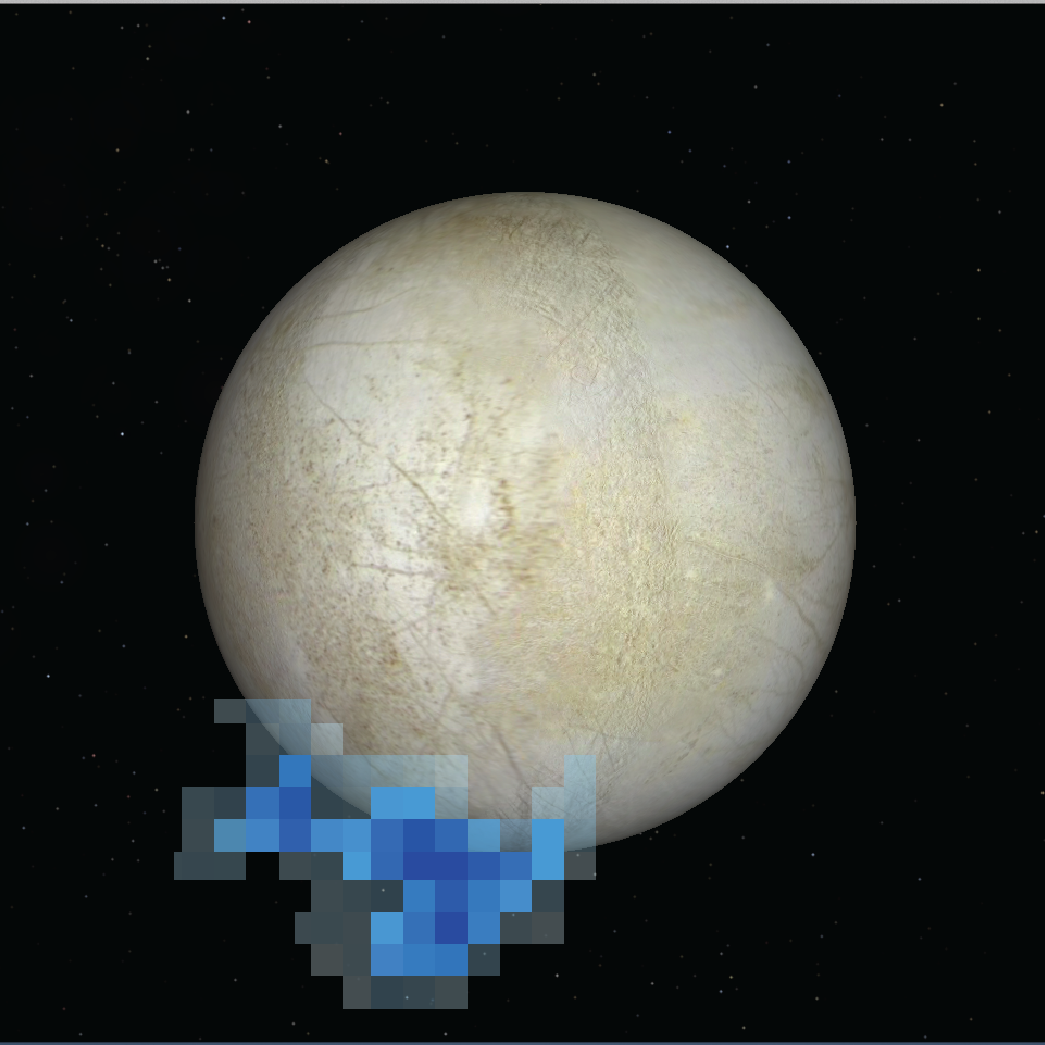

Water vapour plumes over Europa

This artist's rendering shows the location of plumes of water vapour detected over Europa's south pole in observations taken by the NASA/ESA Hubble Space Telescope in December 2012.

The appearance of the plumes in this graphic is based on spectroscopic observations of oxygen and hydrogen in the auroral emissions. The aurora is powered by Jupiter’s magnetic field. This is only the second moon in the solar system found ejecting water vapour from its frigid surface.

The surface of Europa is derived from a global surface map generated from combined NASA Voyager and Galileo space probe observations.

Credit: NASA, ESA, and L. Roth (Southwest Research Institute and University of Cologne, Germany) Science Credit: NASA, ESA, L. Roth (Southwest Research Institute and University of Cologne, Germany), J. Saur (University of Cologne, Germany), K. Retherford (Southwest Research Institute), D. Strobel and P. Feldman (Johns Hopkins University), M. McGrath (Marshall Space Flight Center), and F. Nimmo (University of California, Santa Cruz)